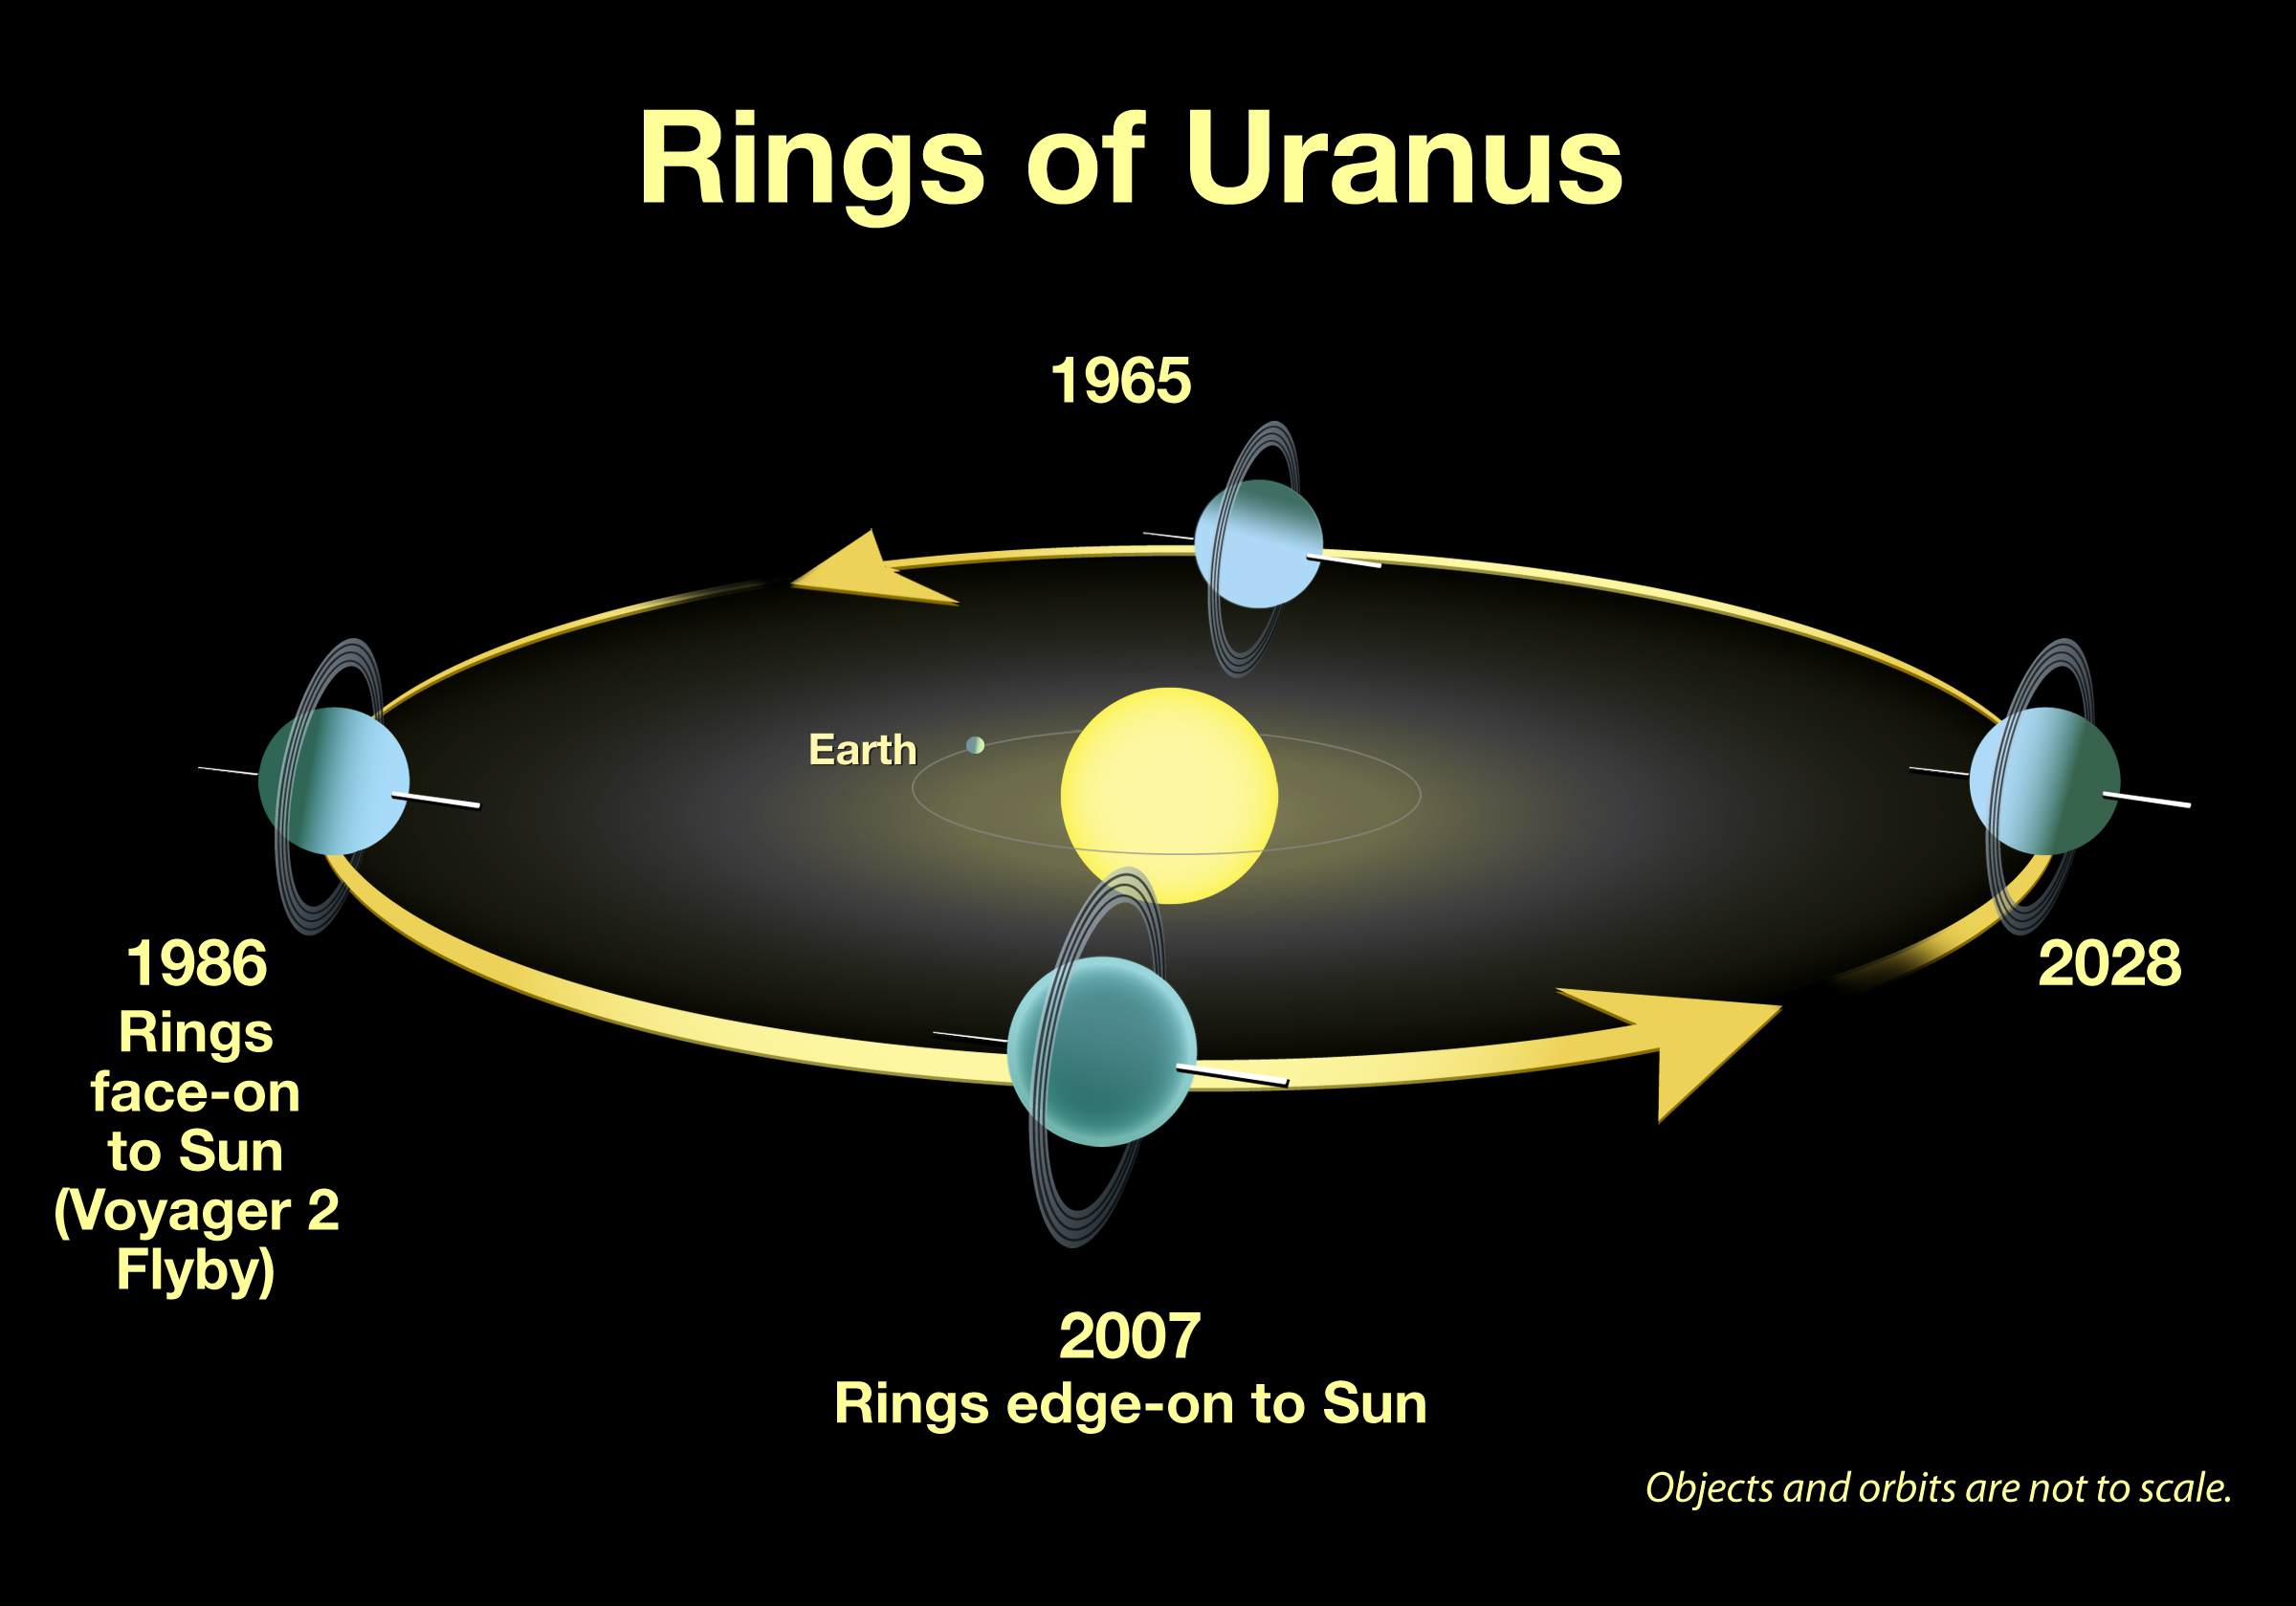

Rings of Uranus

An illustration showing the position of the rings of Uranus from 1965 to 2028.

Credit: NASA, ESA, and and M. Showalter (SETI Institute)